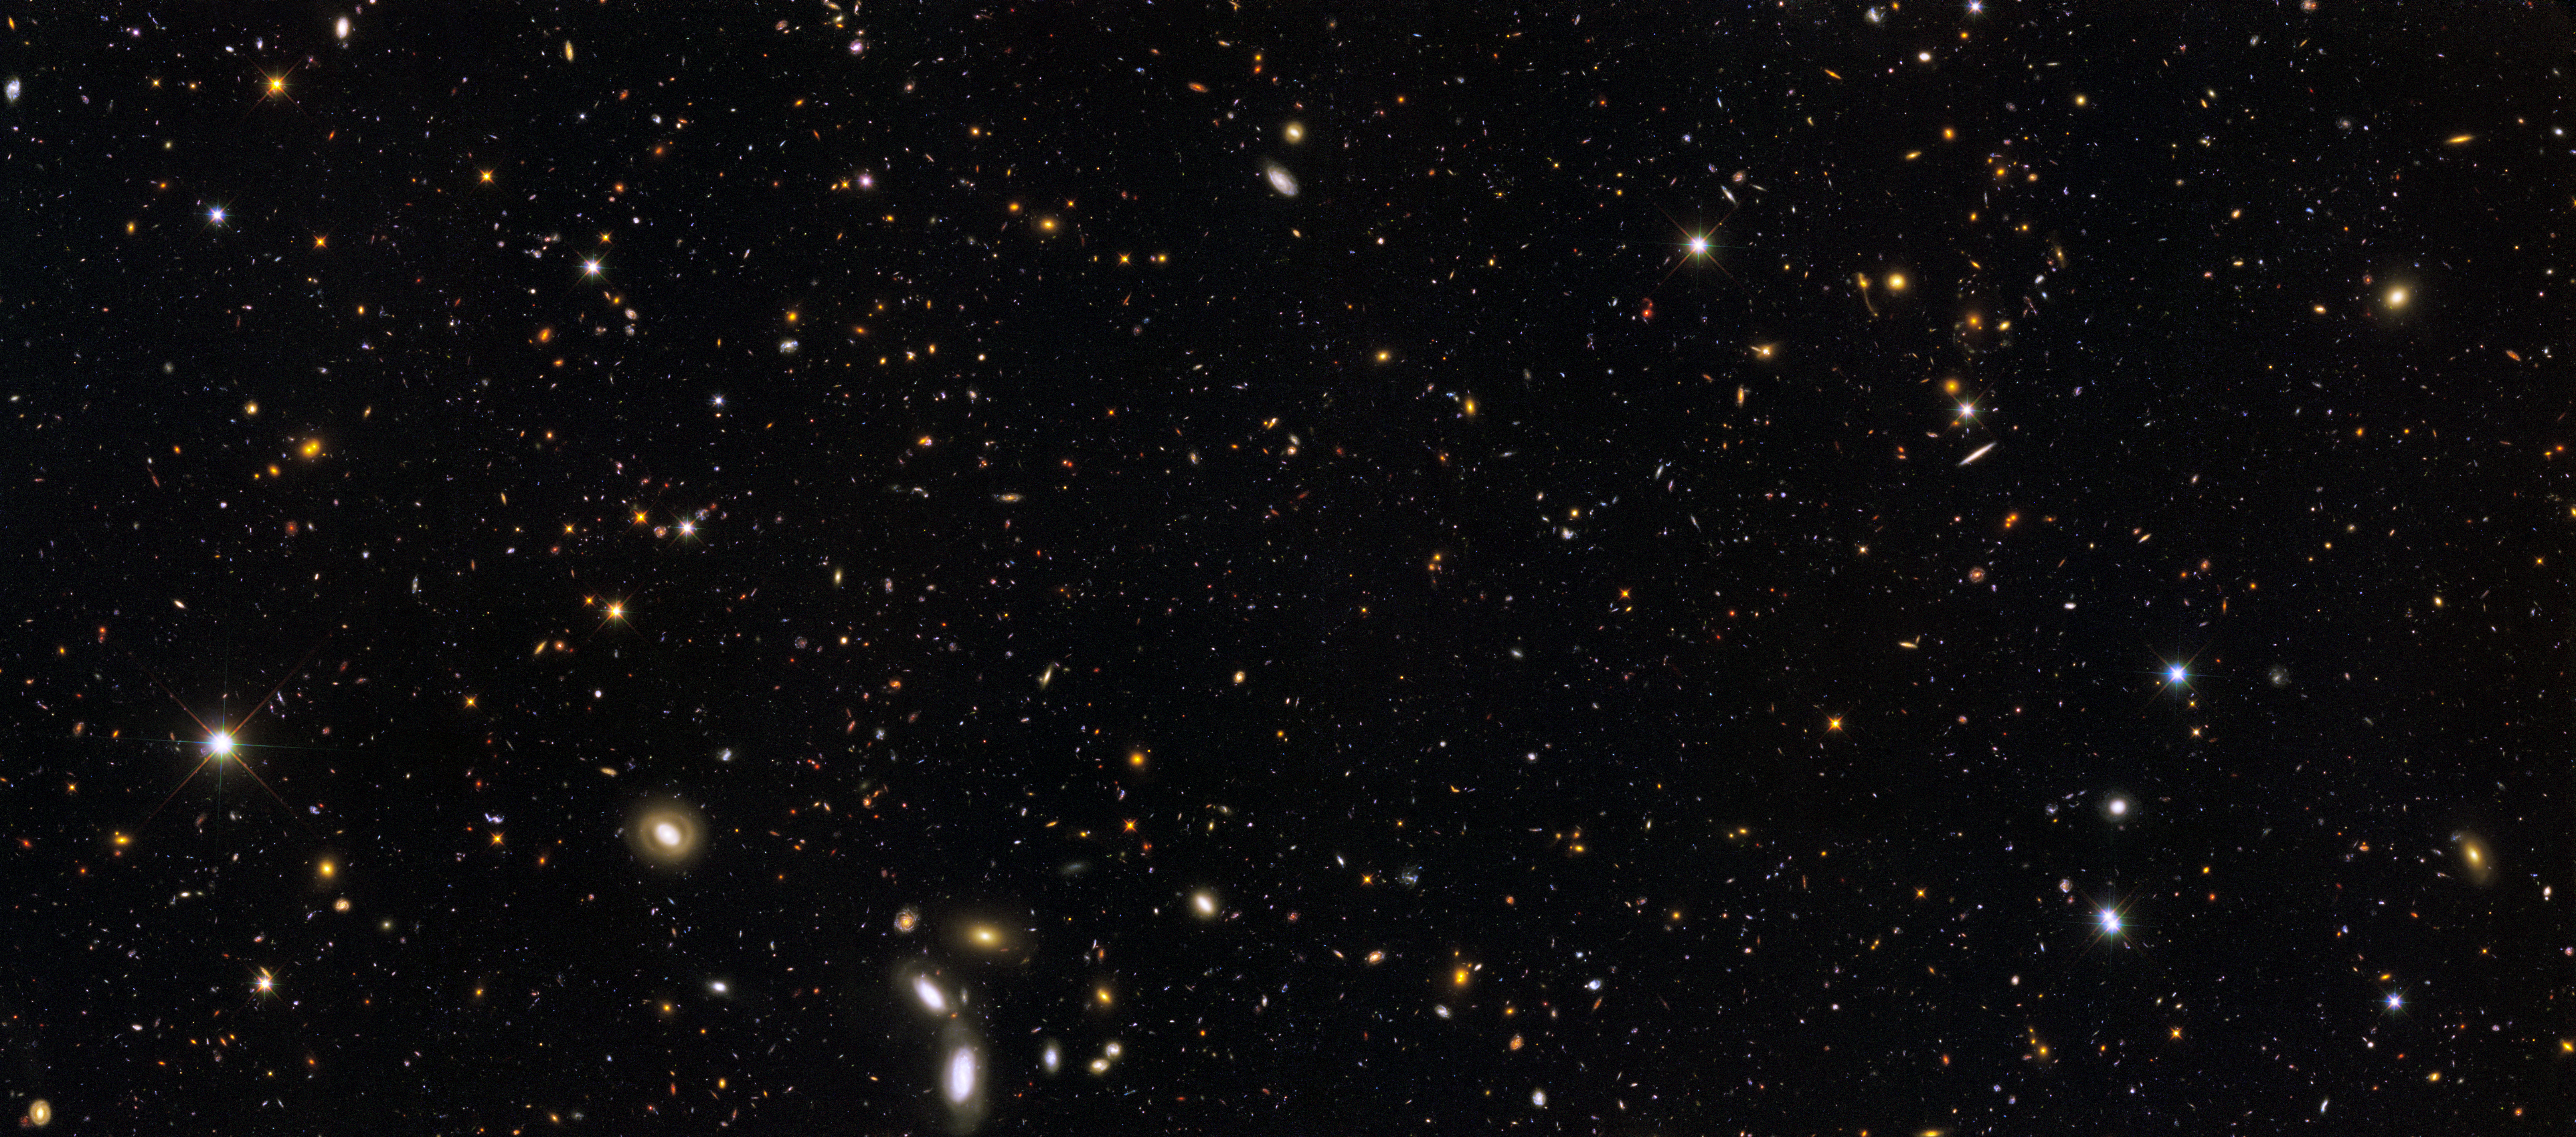

GOODS/ERS2 Field

More than 12 billion years of cosmic history are shown in this unprecedented, panoramic, full-colour view of thousands of galaxies in various stages of assembly.

This image, taken by the NASA/ESA Hubble Space Telescope, was made from mosaics taken in September and October 2009 with the newly installed Wide Field Camera 3 (WFC3) and in 2004 with the Advanced Camera for Surveys (ACS). The view covers a portion of the southern field of a large galaxy census called the Great Observatories Origins Deep Survey (GOODS), a deep-sky study by several observatories to trace the formation and evolution of galaxies.

The final image combines a broad range of colours, from the ultraviolet, through visible light, and into the near-infrared. Such a detailed multi-colour view of the universe has never before been assembled in such a combination of colour, clarity, accuracy, and depth.

Hubble's sharp resolution and new colour versatility, produced by combining data from the two cameras, are allowing astronomers to sort out the various stages of galaxy formation. The image reveals galaxy shapes that appear increasingly chaotic at each earlier epoch, as galaxies grew through accretion, collisions, and mergers. The galaxies range from the mature spirals and ellipticals in the foreground, to smaller, fainter, irregularly shaped galaxies, most of which are farther away, and therefore existed farther back in time. These smaller galaxies are considered the building blocks of the larger galaxies we see today.

Astronomers are using this multi-colour panorama to trace many details of galaxy assembly over cosmic time, including the star-formation rate in galaxies, the rate of mergers among galaxies, and the abundance of weak active galactic nuclei.

The image shows a rich tapestry of 7,500 galaxies stretching back through most of the universe's history. The closest galaxies seen in the foreground emitted their observed light about a billion years ago. The farthest galaxies, a few of the very faint red specks, are seen as they appeared more than 13 billion years ago, or roughly 650 million years after the Big Bang. This mosaic spans a slice of space that is equal to about a third of the diameter of the full Moon (10 arcminutes).

The new Hubble view highlights a wide variety of stages in the galaxy assembly process. Ultraviolet light taken by WFC3 shows the blue glow of hot, young stars in galaxies teeming with star birth. The orange light reveals the final buildup of massive galaxies about 8 billion to 10 billion years ago. The near-infrared light displays the red glow of very distant galaxies — in a few cases as far as 12 billion to 13 billion light-years away — whose light has been stretched, like a toy Slinky, from ultraviolet light to longer-wavelength infrared light due to the expansion of the universe.

In this ambitious use of Hubble's observing time, astronomers used 96 Hubble orbits to make the ACS optical observations of this slice of the GOODS field and 104 orbits to make the WFC3 ultraviolet and near-infrared exposures. WFC3 peered deeper into the universe in this study than comparable near-infrared observations from ground-based telescopes. This set of unique new Hubble observations reveals galaxies to about 27th magnitude in brightness over a factor of 10 in wavelength. That's over 250 million times fainter than the unaided eye can see in visual light from a dark ground-based site.

Credit: NASA, ESA, R. Windhorst, S. Cohen, M. Mechtley, and M. Rutkowski (Arizona State University, Tempe), R. O'Connell (University of Virginia), P. McCarthy (Carnegie Observatories), N. Hathi (University of California, Riverside), R. Ryan (University of California, Davis), H. Yan (Ohio State University) and A. Koekemoer (Space Telescope Science Institute)